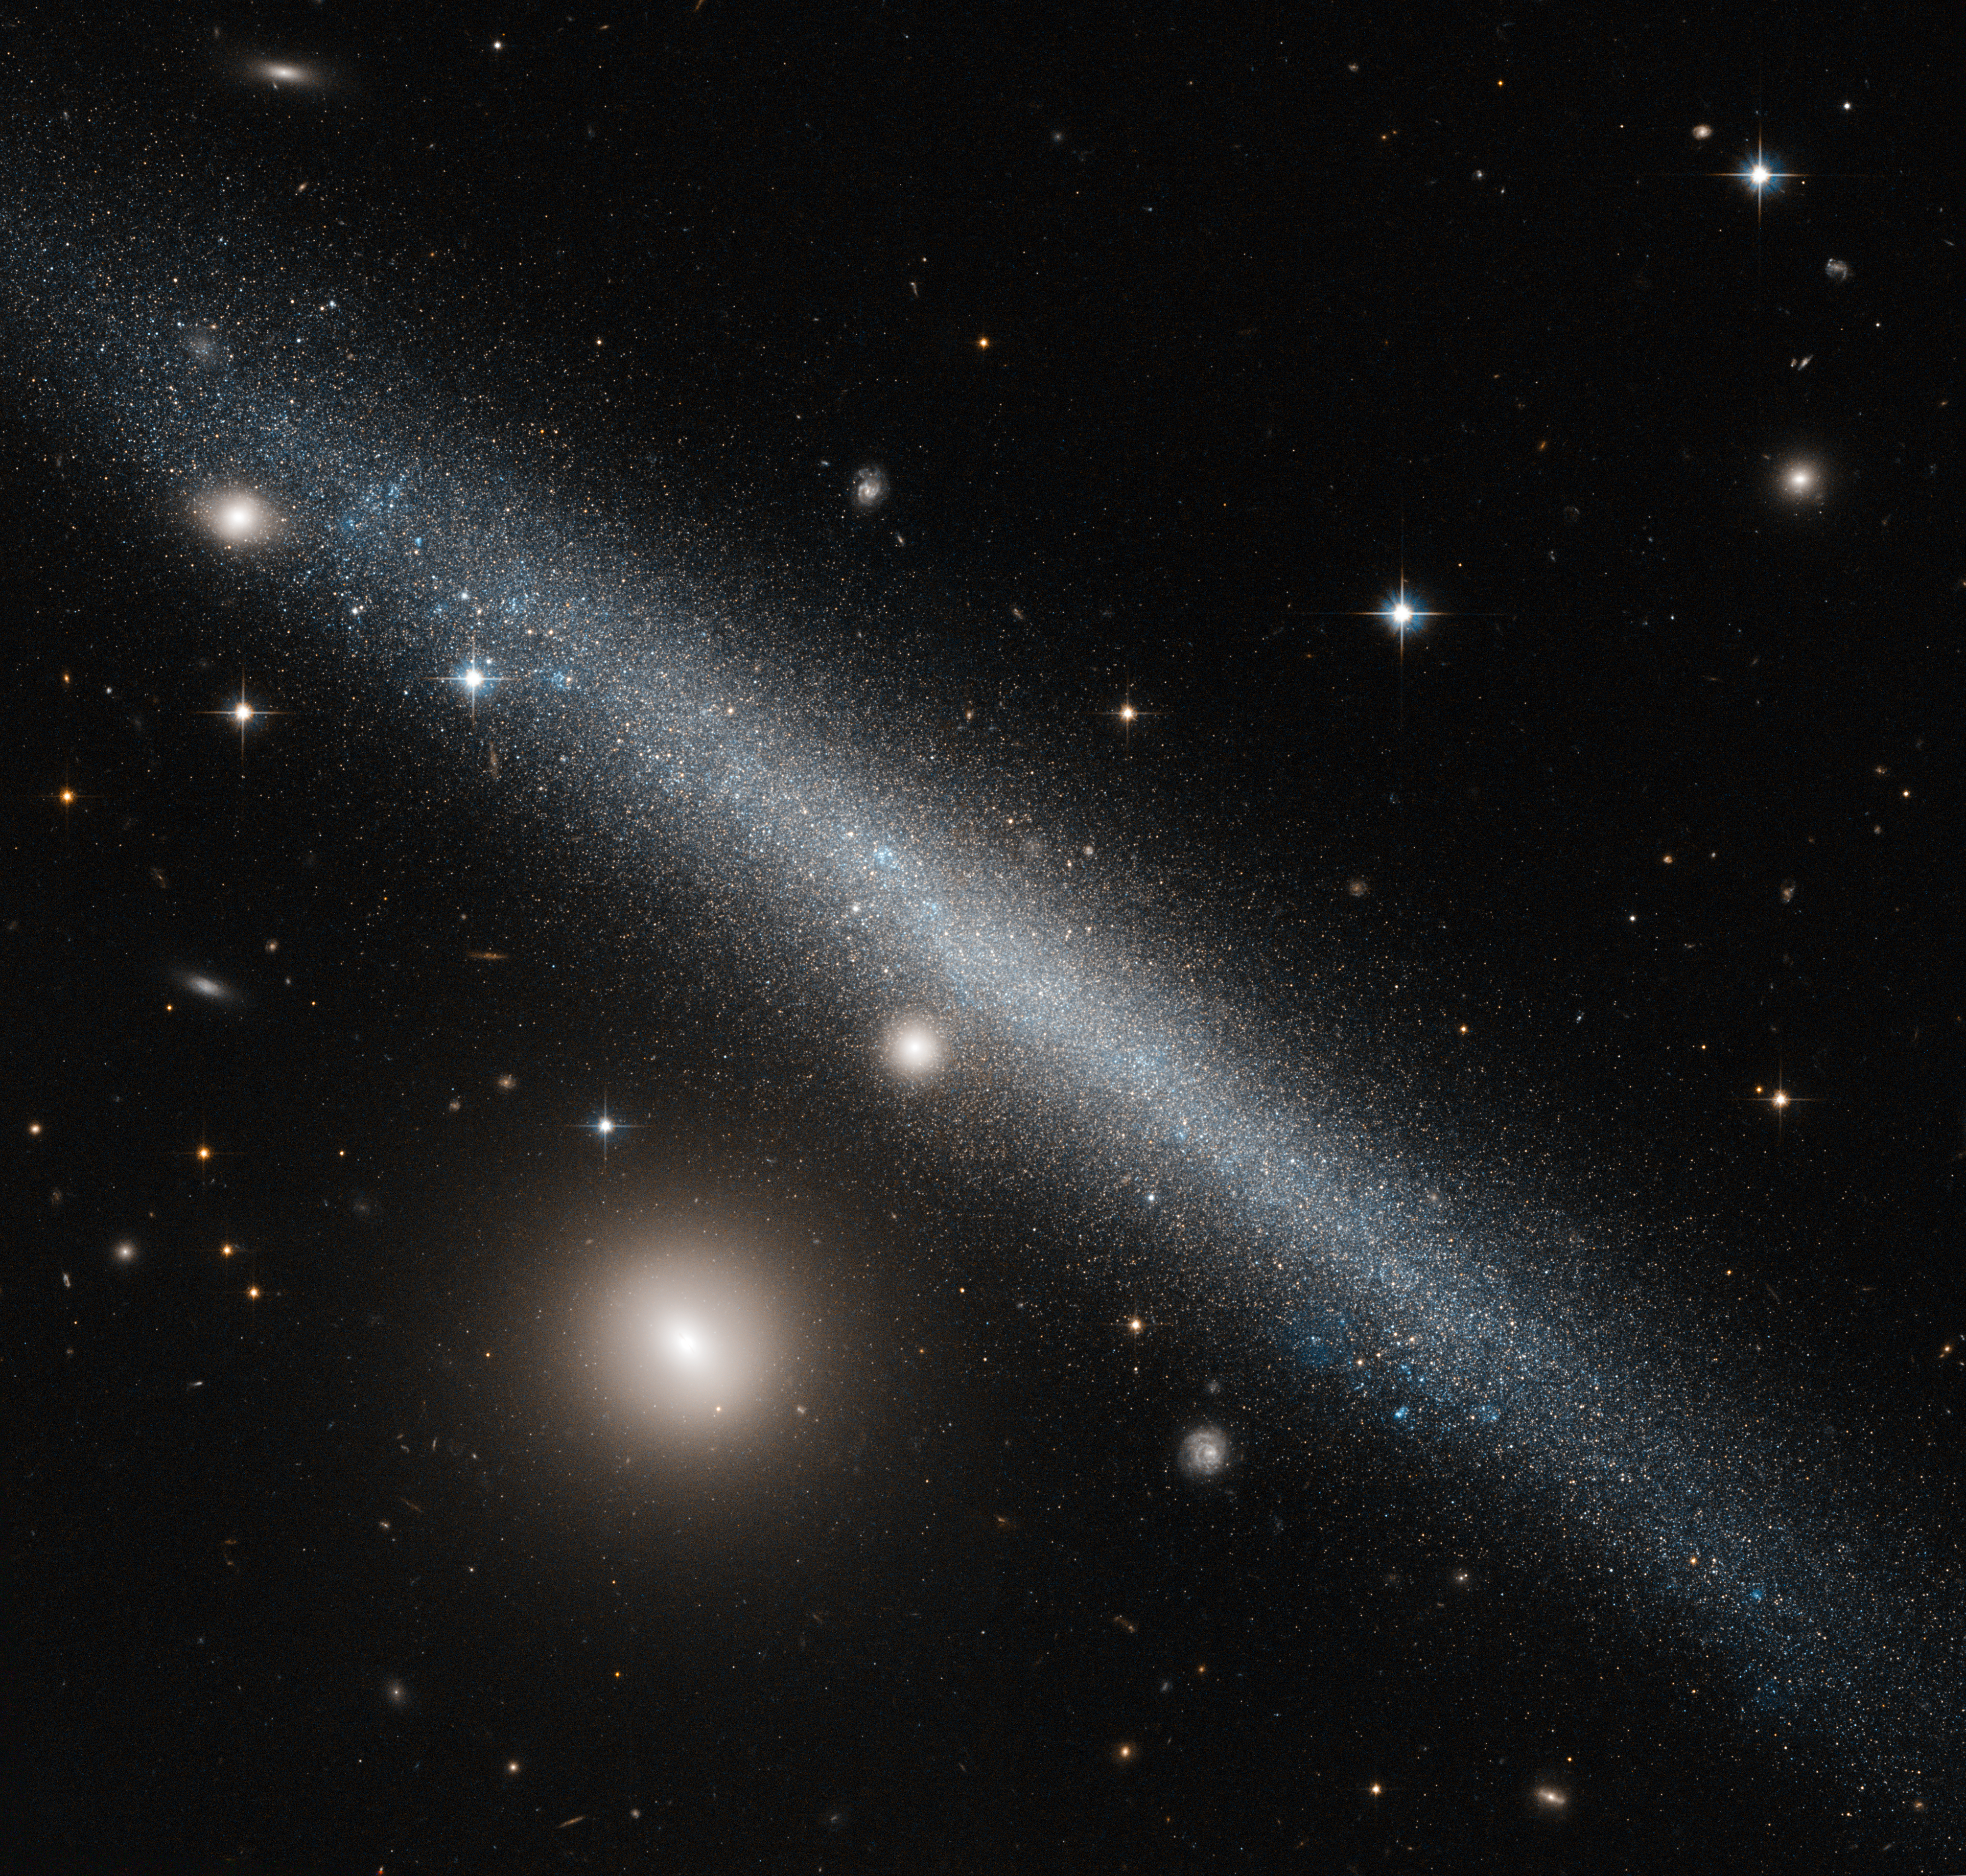

A slashing smudge across the sky

The galaxy cutting dramatically across the frame of this NASA/ESA Hubble Space Telescope image is a slightly warped dwarf galaxy known as UGC 1281. Seen here from an edge-on perspective, this galaxy lies roughly 18 million light-years away in the constellation of Triangulum (The Triangle).

The bright companion to the lower left of UGC 1281 is the small galaxy PGC 6700, officially known as 2MASX J01493473+3234464. Other prominent stars belonging to our own galaxy, the Milky Way, and more distant galaxies can be seen scattered throughout the sky.

The side-on view we have of UGC 1281 makes it a perfect candidate for studies into how gas is distributed within galactic halos — the roughly spherical regions of diffuse gas extending outwards from a galaxy’s centre. Astronomers have studied this galaxy to see how its gas vertically extends out from its central plane, and found it to be a quite typical dwarf galaxy. However, it does have a slightly warped shape to its outer edges, and is forming stars at a particularly low rate.

A version of this image was entered into the Hubble's Hidden Treasures image processing competition by contestant Luca Limatola.

Credit: ESA/Hubble & NASA Acknowledgement: Luca Limatola